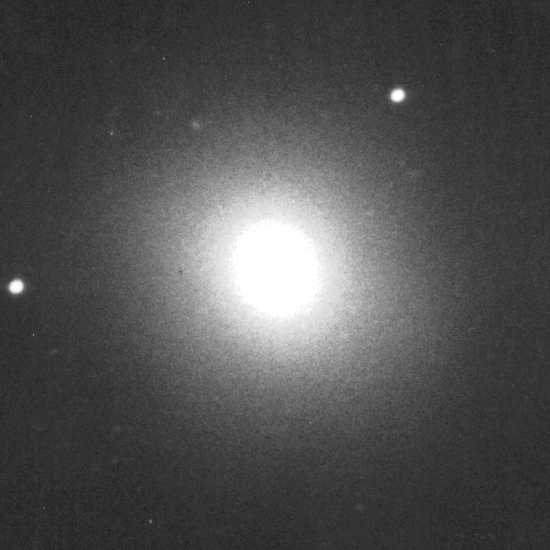

Galaxies: Snapshots in time

Single images from the Galaxies: Snapshots in Time collage.

Credit: NASA & ESA